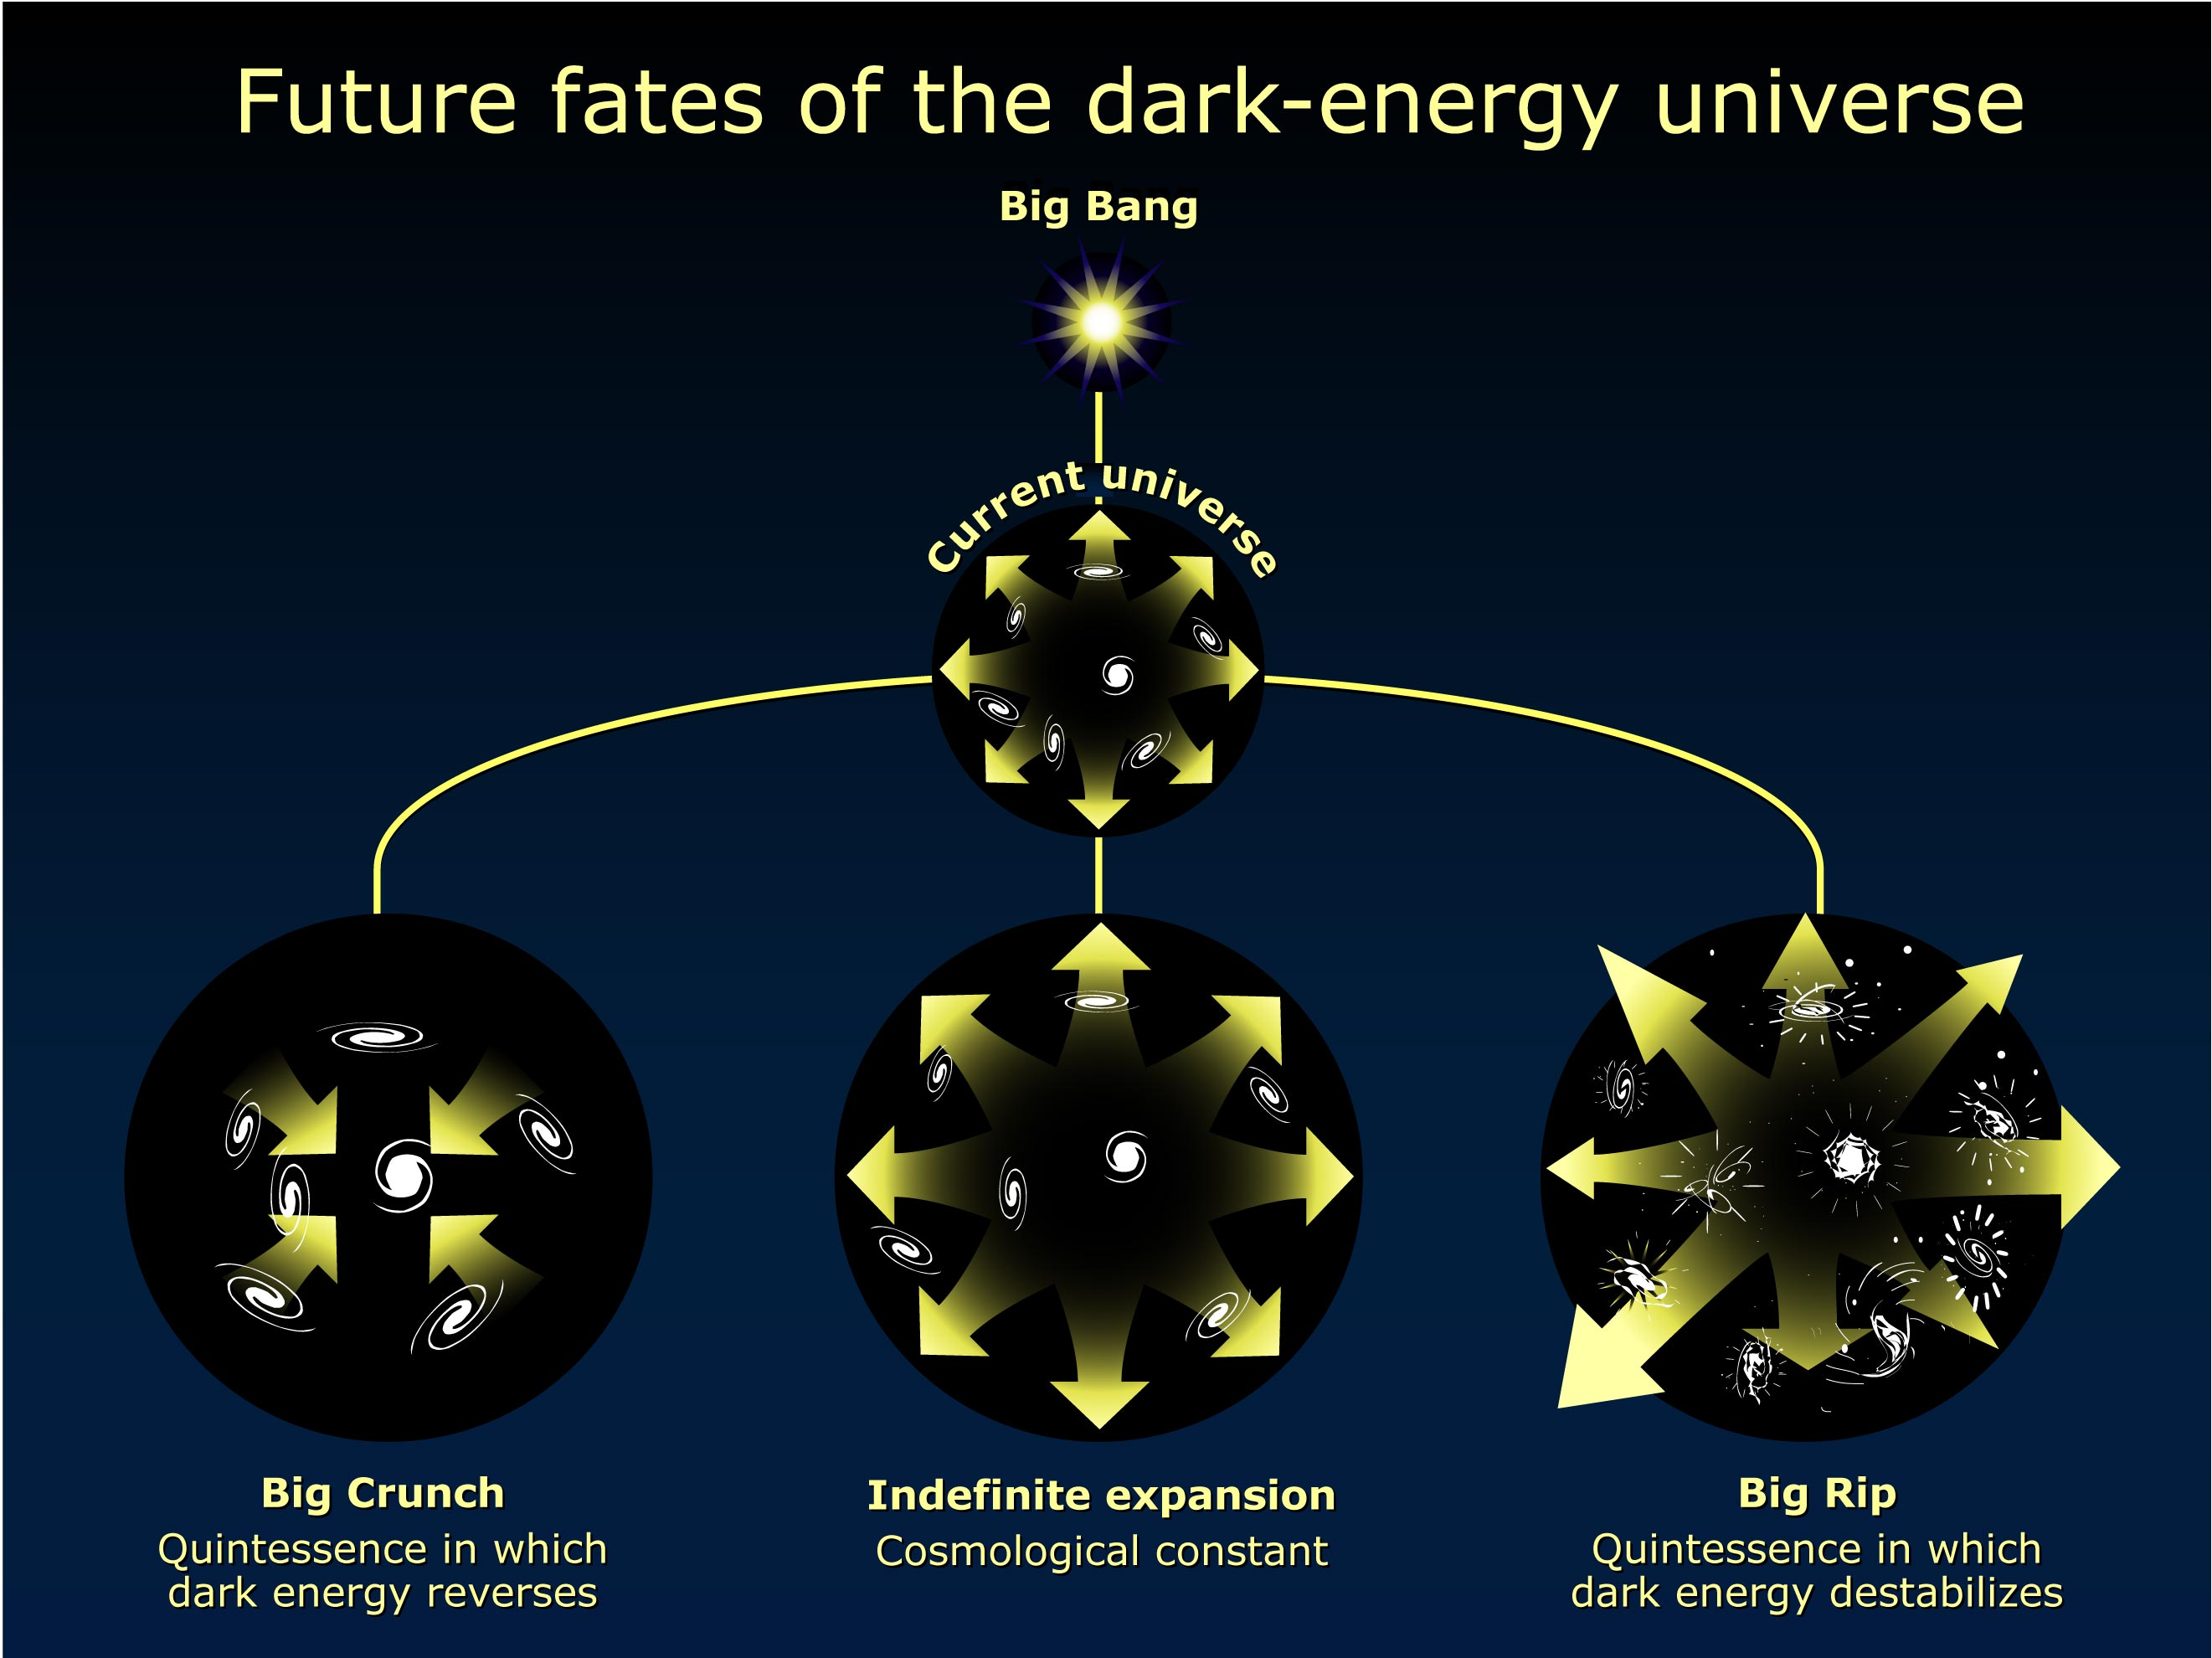

Possible fates of the Universe

When astronomers first realized the universe was accelerating, the conventional wisdom was that it would expand forever. However, until we better understand the nature of dark energy other scenarios for the fate of the universe are possible. This diagram outlines these possible fates.

Credit: NASA/ESA and A. Riess (STScI)